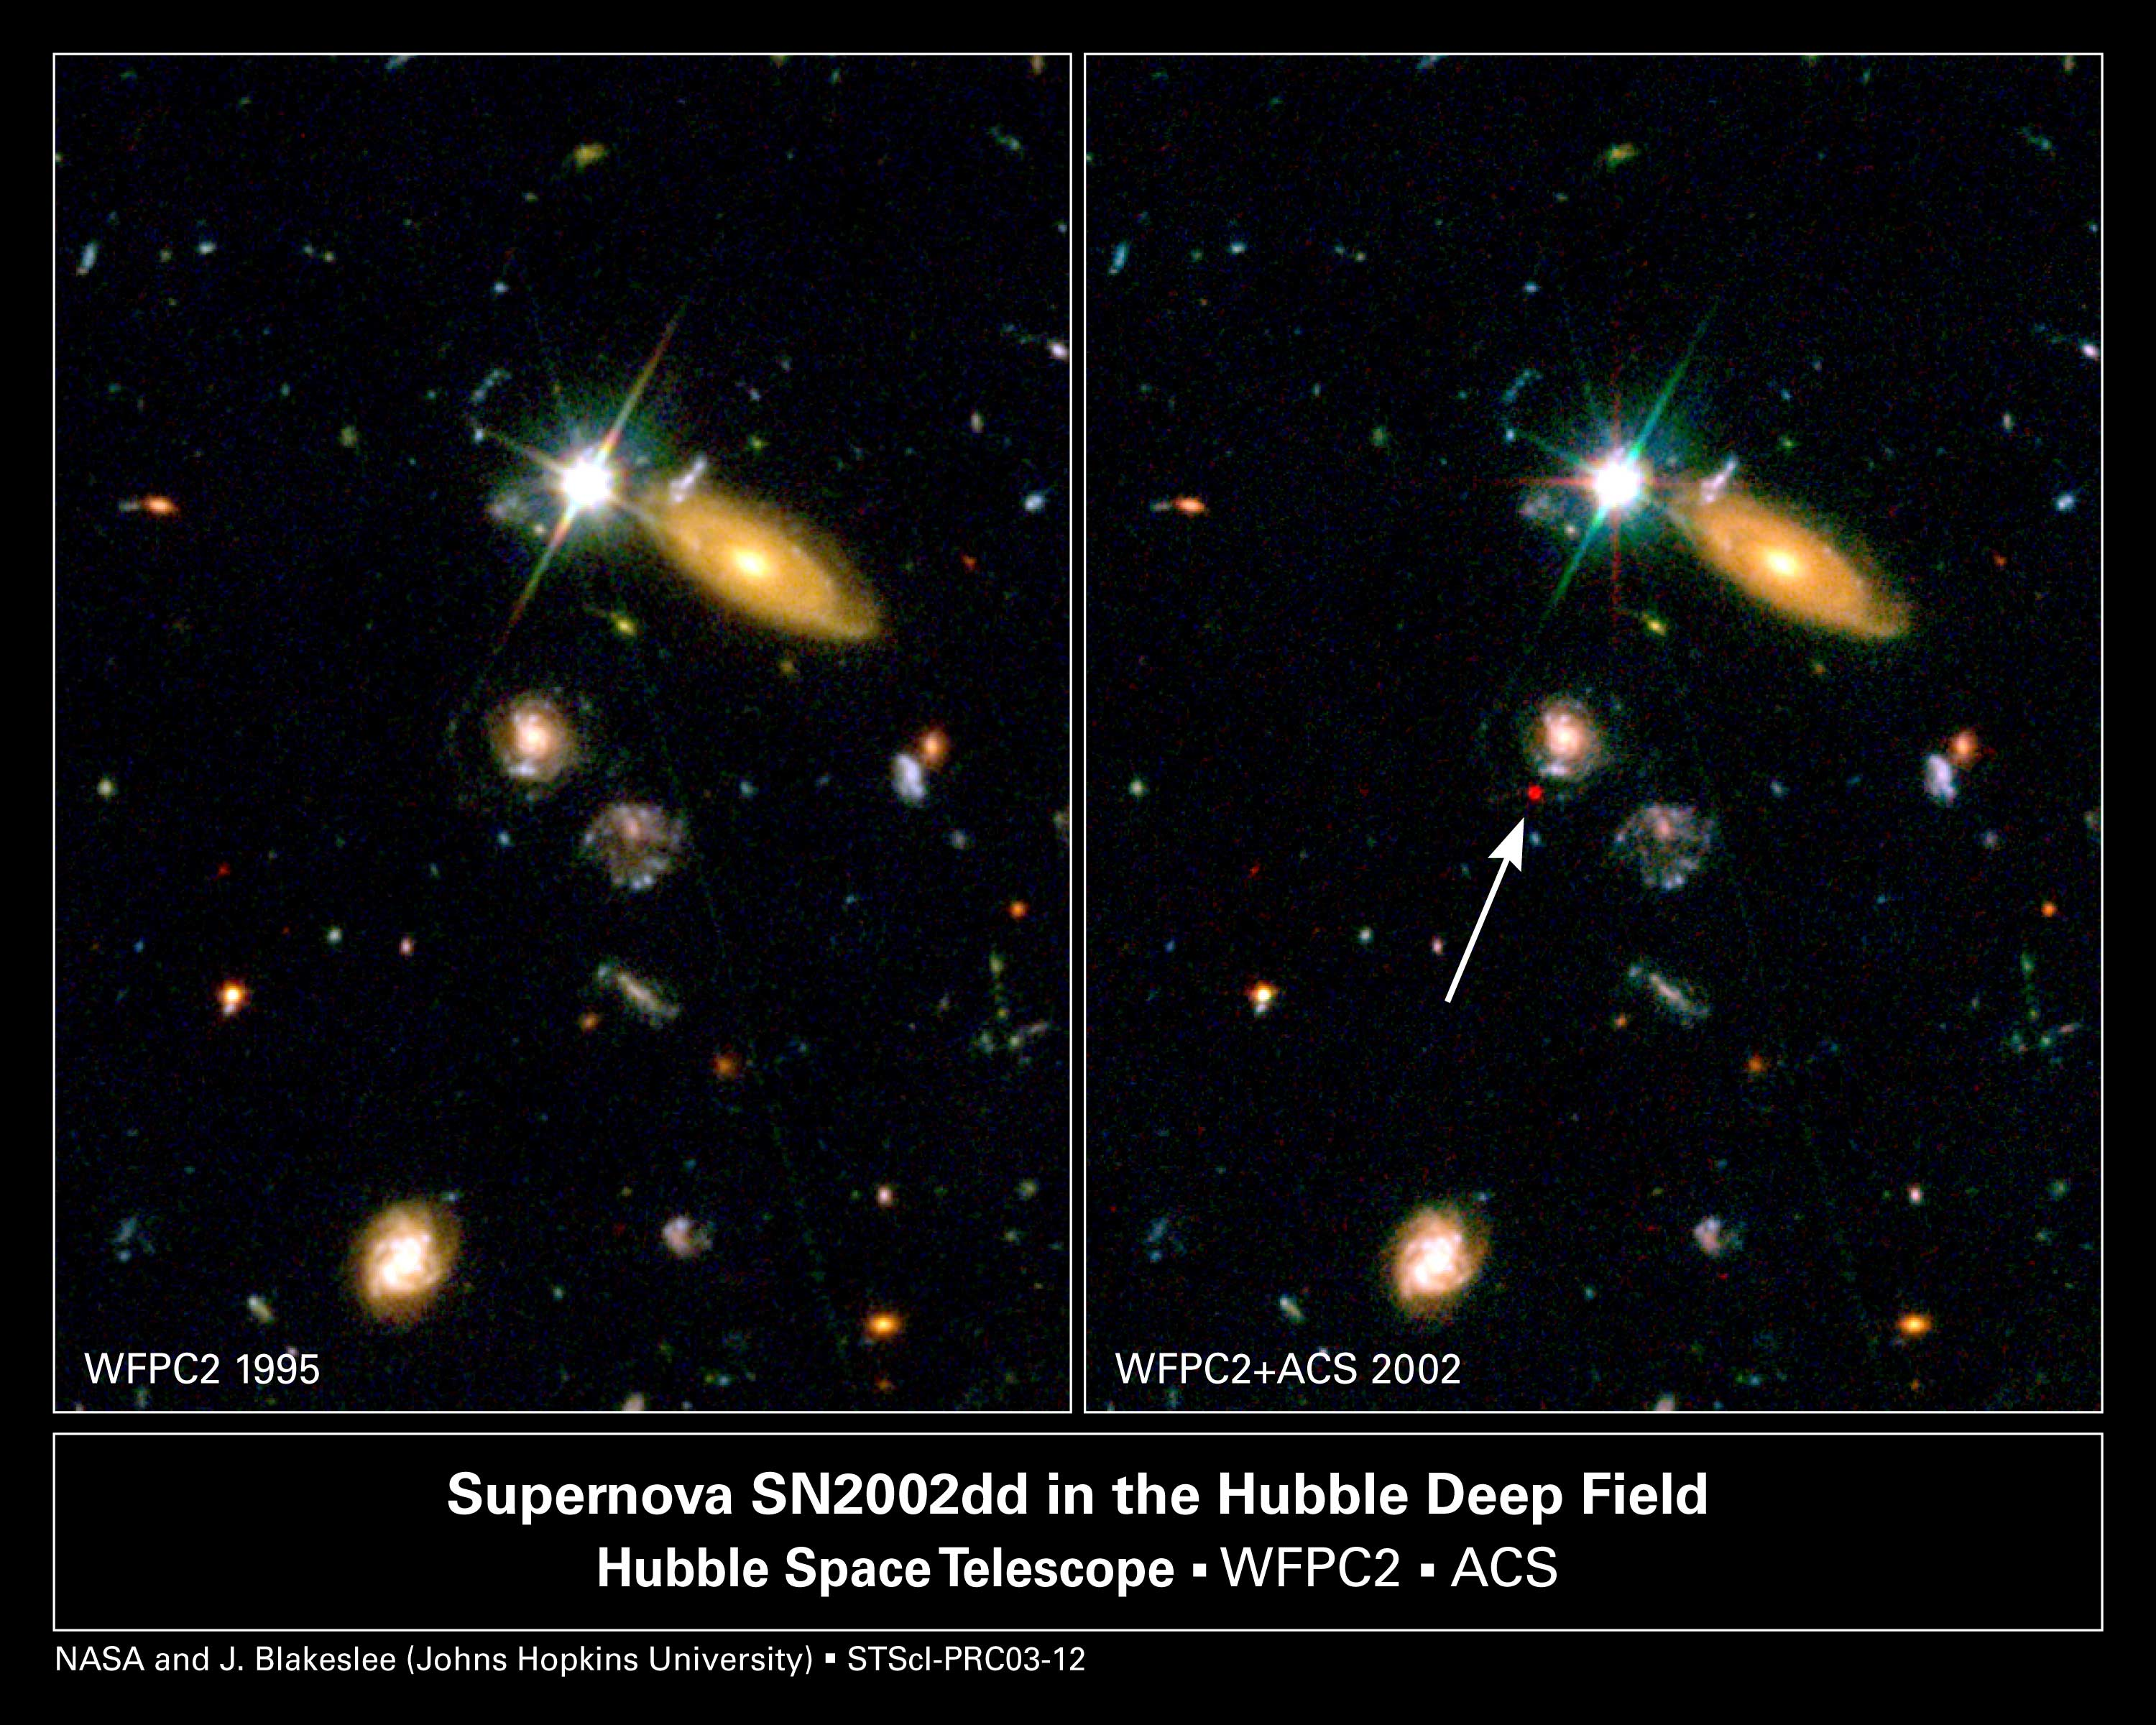

Far-Flung Supernova Sheds Light on Dark Universe

[Left] - A Hubble Space Telescope image of a portion of the Hubble Deep Field North as originally photographed in 1995 with the Wide Field Planetary Camera 2. [Right] - A composite image of the same field as imaged by Hubble's Advanced Camera for Surveys (ACS), combined with the original WFPC2 image. The ACS observations were made in May and June 2002. The red spot is the glow of a very distant supernova captured exploding in the field. The supernova is estimated to be 8 billion light-years away. The supernova appears deep red in this composite image because it was photographed by the ACS at far-red wavelengths. Distant supernovae are used by astronomers to fill in the blank region where the universe's rate of expansion switched from deceleration due to gravity to acceleration due to the repulsive force of 'dark energy.'

Credit: NASA/ESA and J. Blakeslee (JHU)